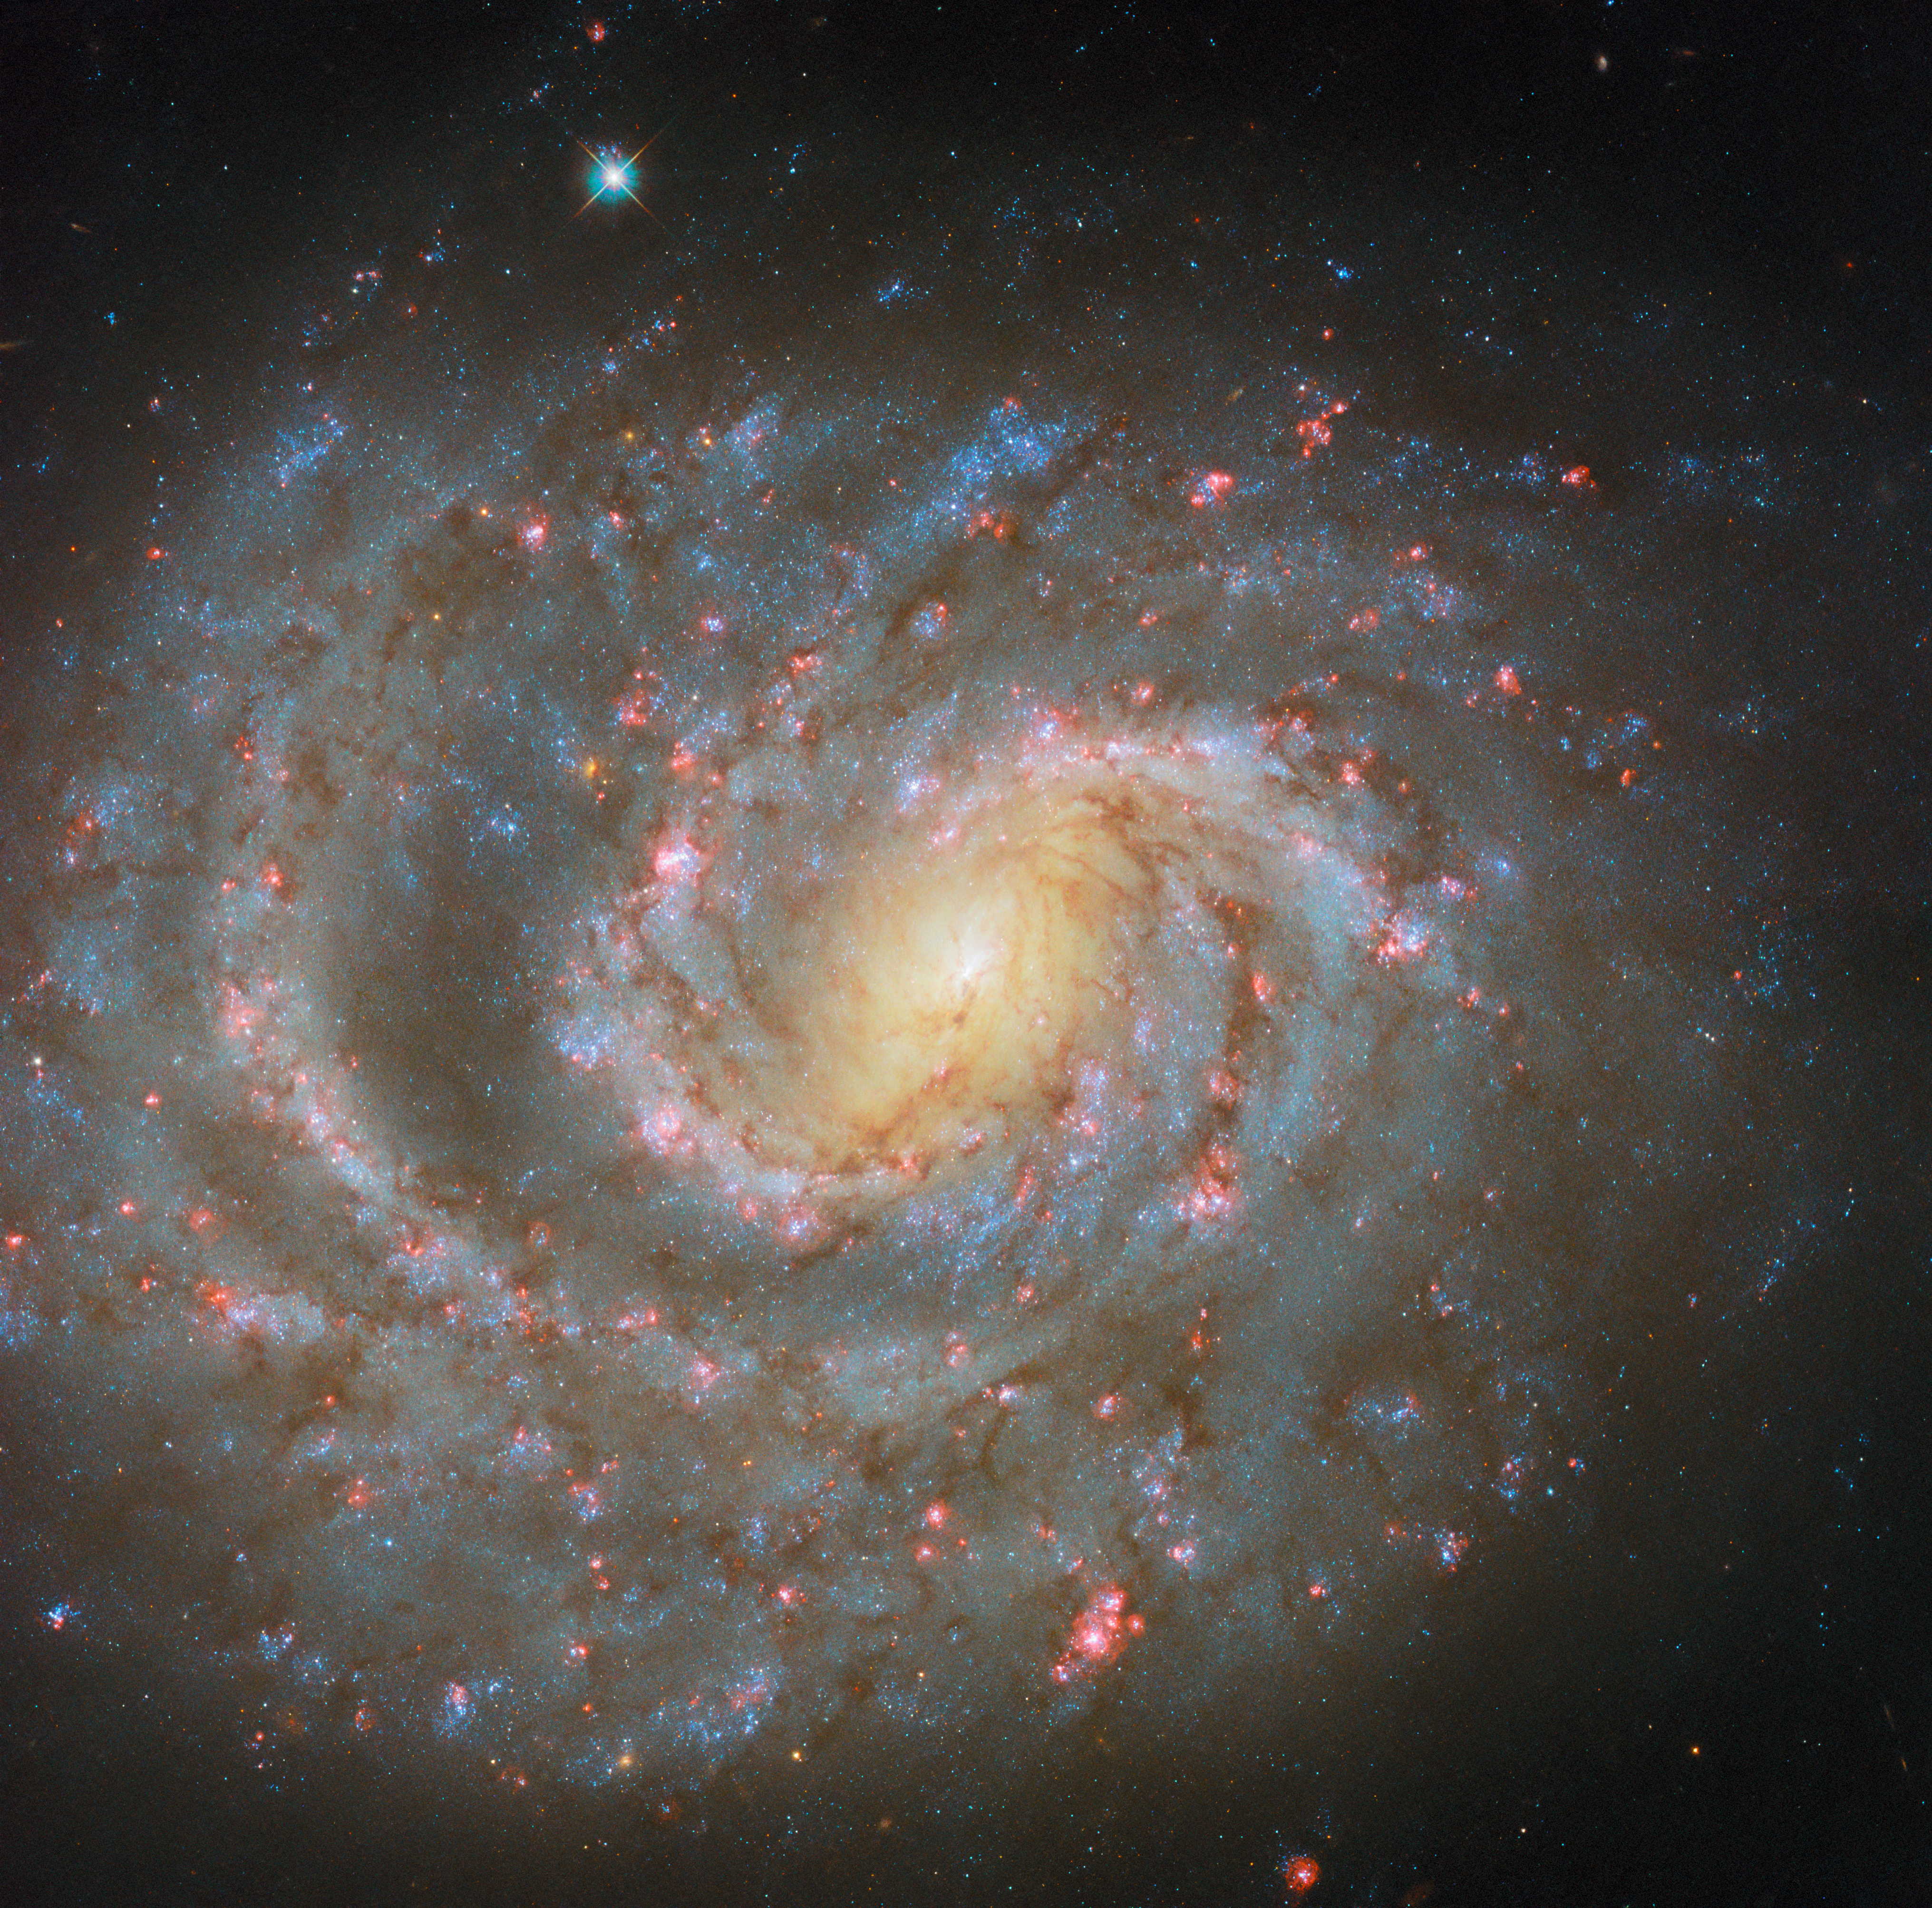

Signs of the stellar lifecycle

The subject of this NASA/ESA Hubble Space Telescope Picture of the Week is NGC 1637, a spiral galaxy located 38 million light-years from Earth in the constellation Eridanus.

This image comes from an observing programme dedicated to studying star formation in nearby galaxies. Stars form in cold, dusty gas clouds that collapse under their own gravity. As young stars grow, they heat their nurseries through starlight, winds, and powerful outflows. Together, these factors play a role in controlling the rate at which future generations of stars form.

Evidence of star formation is scattered all around NGC 1637, if you know where to look. The galaxy’s spiral arms are dotted with what appear to be pink clouds, many of which are accompanied by bright blue stars. The pinkish colour comes from hydrogen atoms that have been excited by ultraviolet light from young, massive stars. This contrasts with the warm yellow glow of the galaxy’s centre, which is home to a densely packed collection of older, redder stars.

The stars that set their birthplaces aglow are comparatively short-lived, and many of these stars will explode as supernovae just a few million years after they’re born. In 1999, NGC 1637 played host to a supernova, pithily named SN 1999EM, that was lauded as the brightest supernova seen that year. When a massive star expires as a supernova, the explosion outshines its entire home galaxy for a short time. While a supernova marks the end of a star’s life, it can also jump start the formation of new stars by compressing nearby clouds of gas, beginning the stellar lifecycle anew.

Credit: ESA/Hubble & NASA, D. Thilker